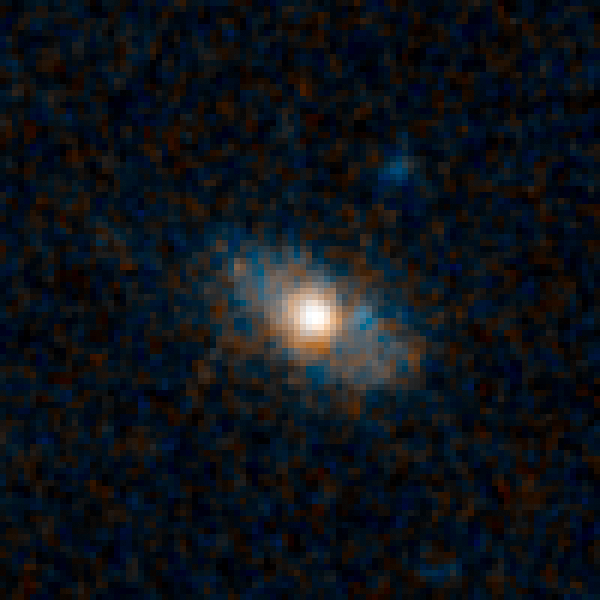

Sample galaxy 25783

Quasars are the brilliant beacons of light that are powered by black holes feasting on captured material, and in the process, heating some of the matter to millions of degrees. The brightest quasars reside in galaxies distorted by collisions with other galaxies.

These encounters send lots of gas and dust into the gravitational whirlpool of hungry black holes. Now, however, astronomers are uncovering an underlying population of fainter quasars that thrive in normal-looking spiral galaxies. They are triggered by black holes snacking on such tasty treats as a batch of gas or the occasional small satellite galaxy.

Credit: NASA, ESA/Hubble, and K. Schawinski (Yale University, USA)